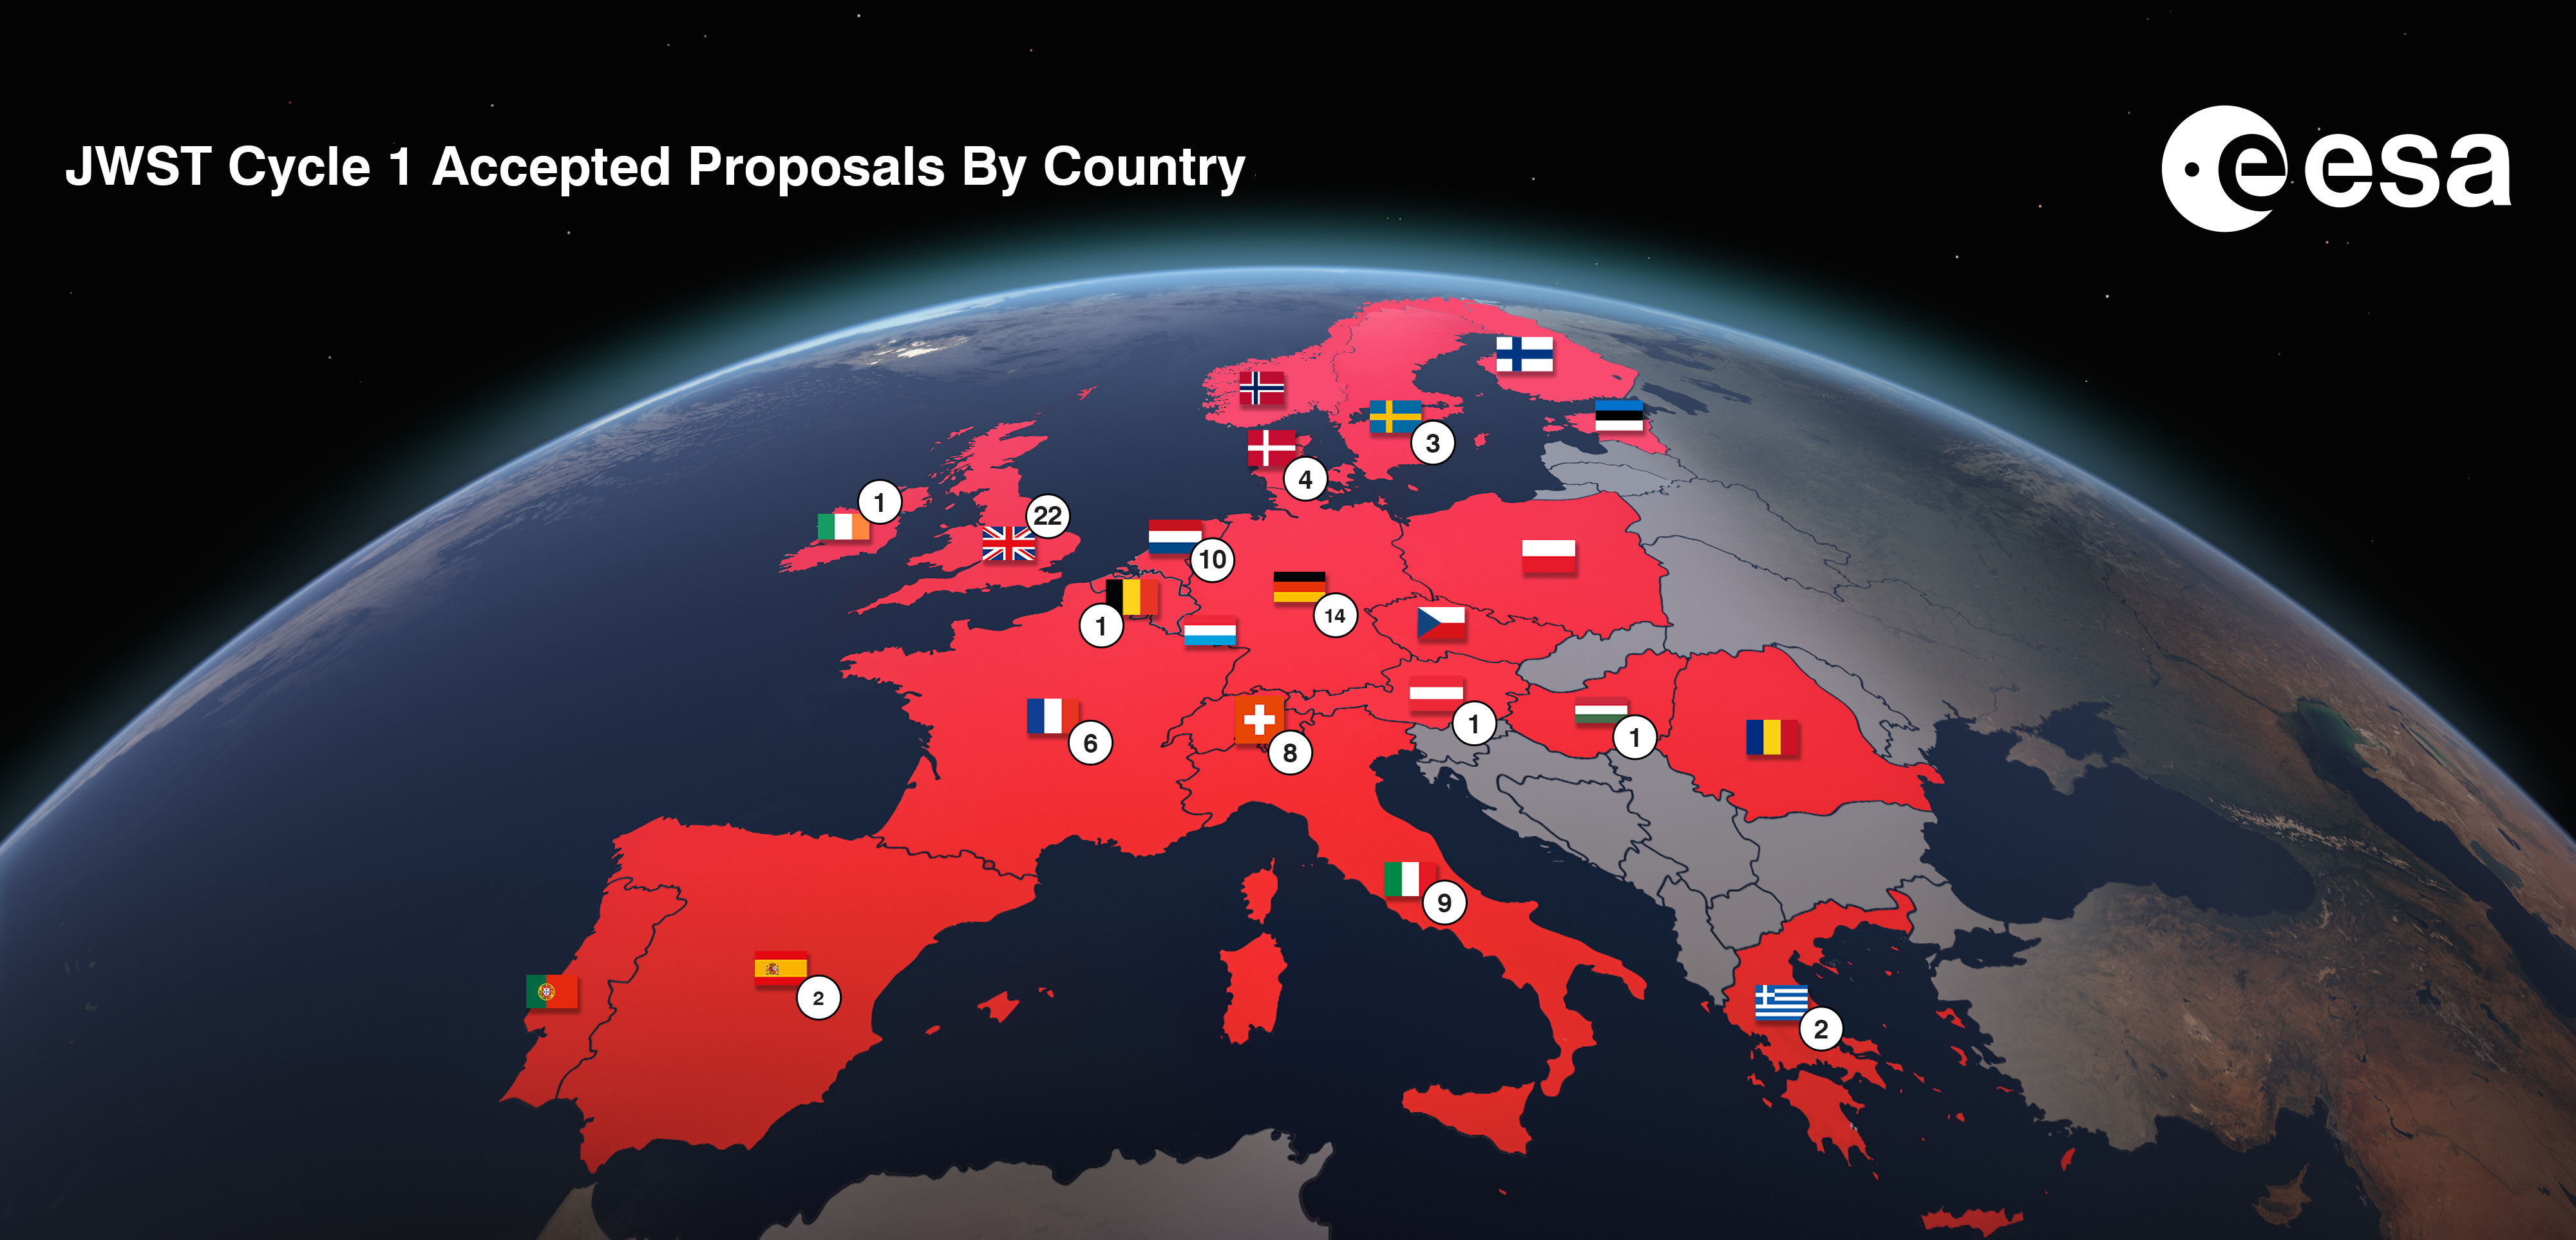

James Webb Space Telescope Cycle 1 Results for Europe

The General Observer scientific observations for the NASA/ESA/CSA James Webb Space Telescope’s (JWST) first year of operation have been selected. Proposals from ESA member states comprise 33% of the total number of selected proposals and correspond to 30% of the available telescope time on Webb.

This map illustrates the accepted the geographical distribution of the Cycle 1 JWST accepted proposals in Europe.

Credit: ESA/Hubble